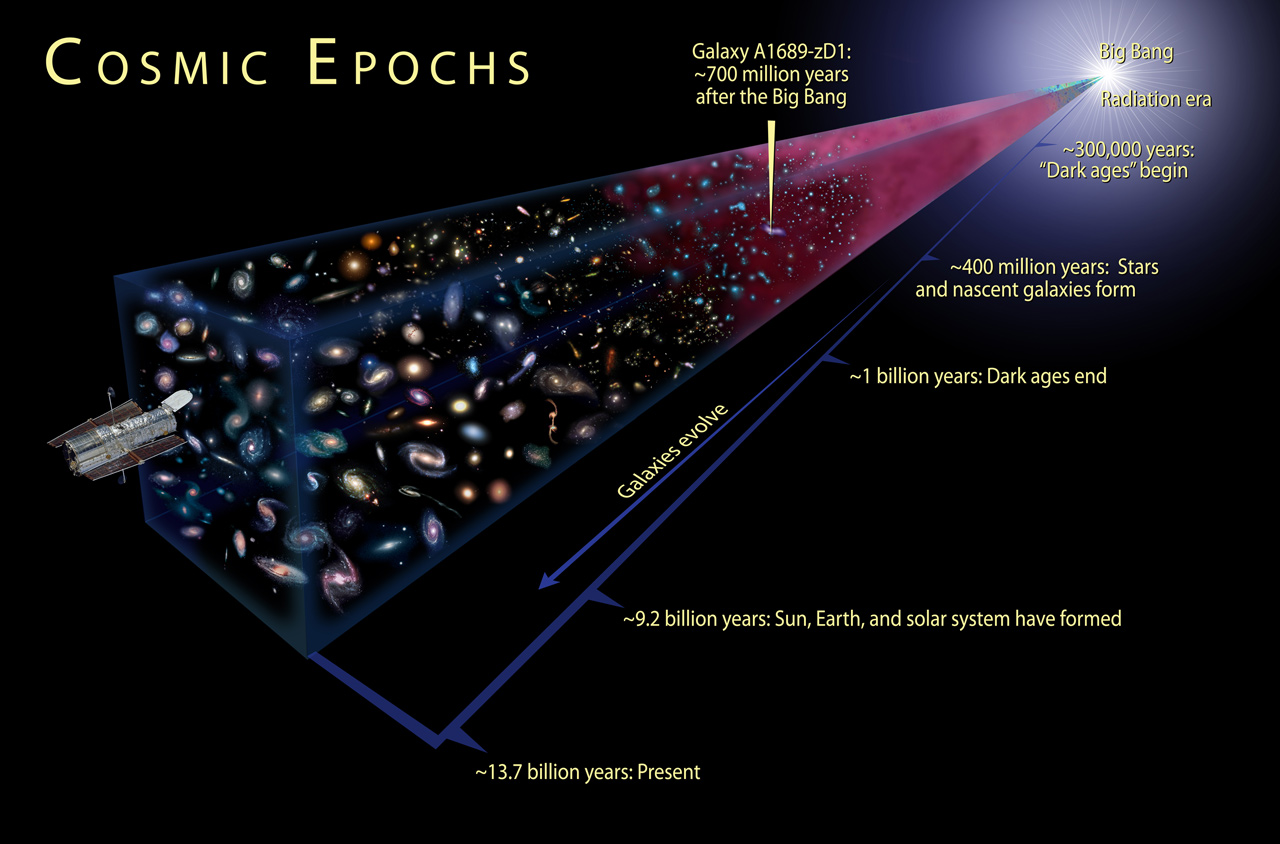

Cosmic Epochs

This is an illustration showing the cosmic epochs of the Universe.

Credit: NASA, ESA, and A. Feild (STScI)